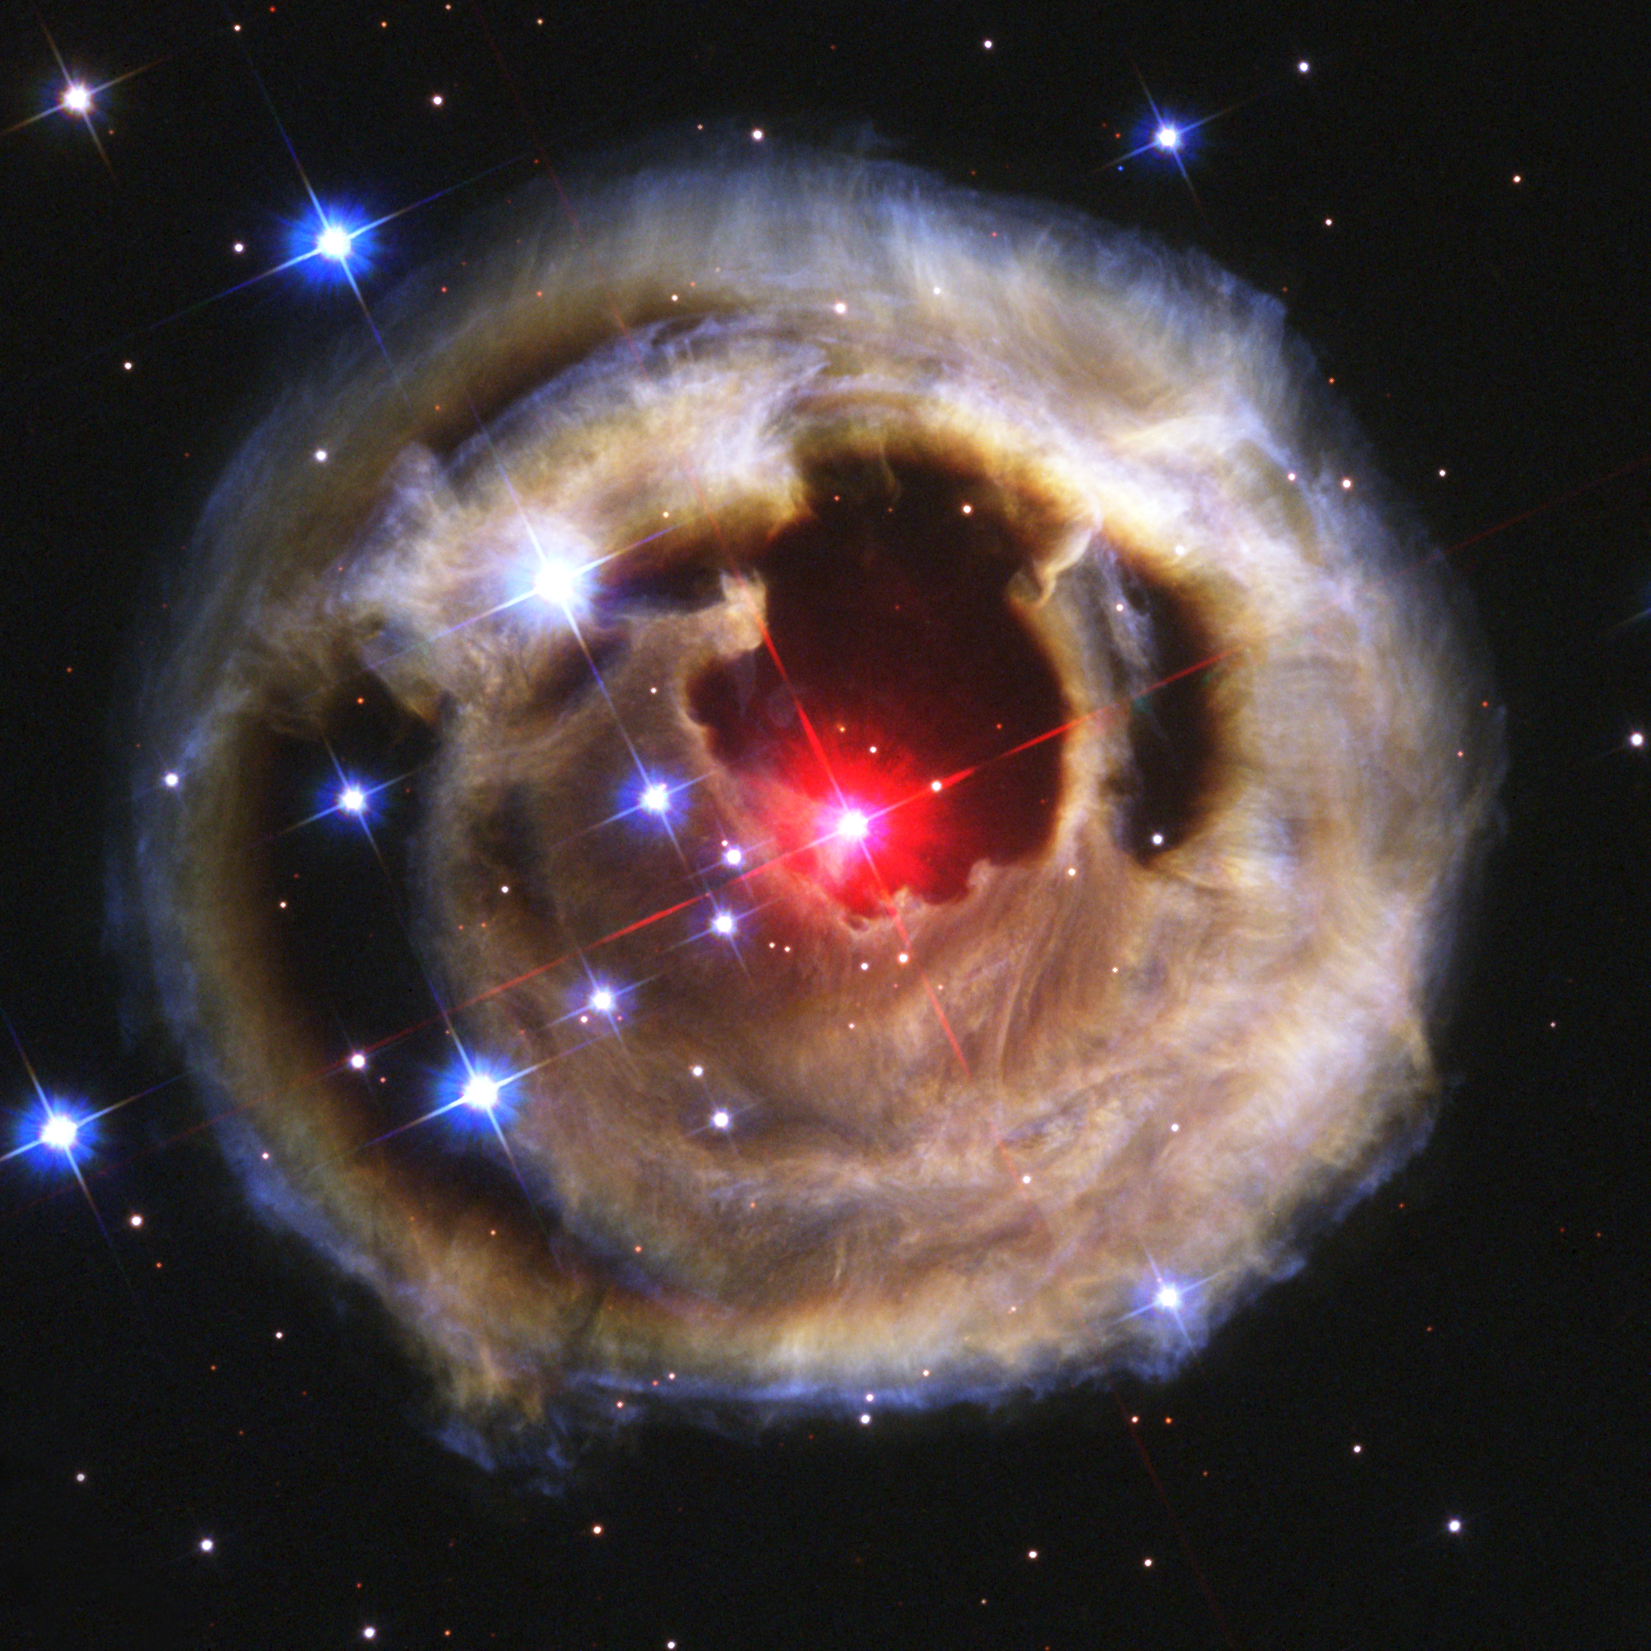

Hubble watches light echo from mysterious erupting star (October 2002 image)

This is the third in a sequence of four pictures from the NASA/ESA Hubble Space Telescope's Advanced Camera for Surveys that dramatically demonstrates the echoing of light through space caused by an unusual stellar outburst in January 2002.

The image was taken 28 October 2002. The image is combined from exposures taken through blue (B), green (V), and infrared (I) filters.

Credit: NASA, European Space Agency, and H.E. Bond (STScI)